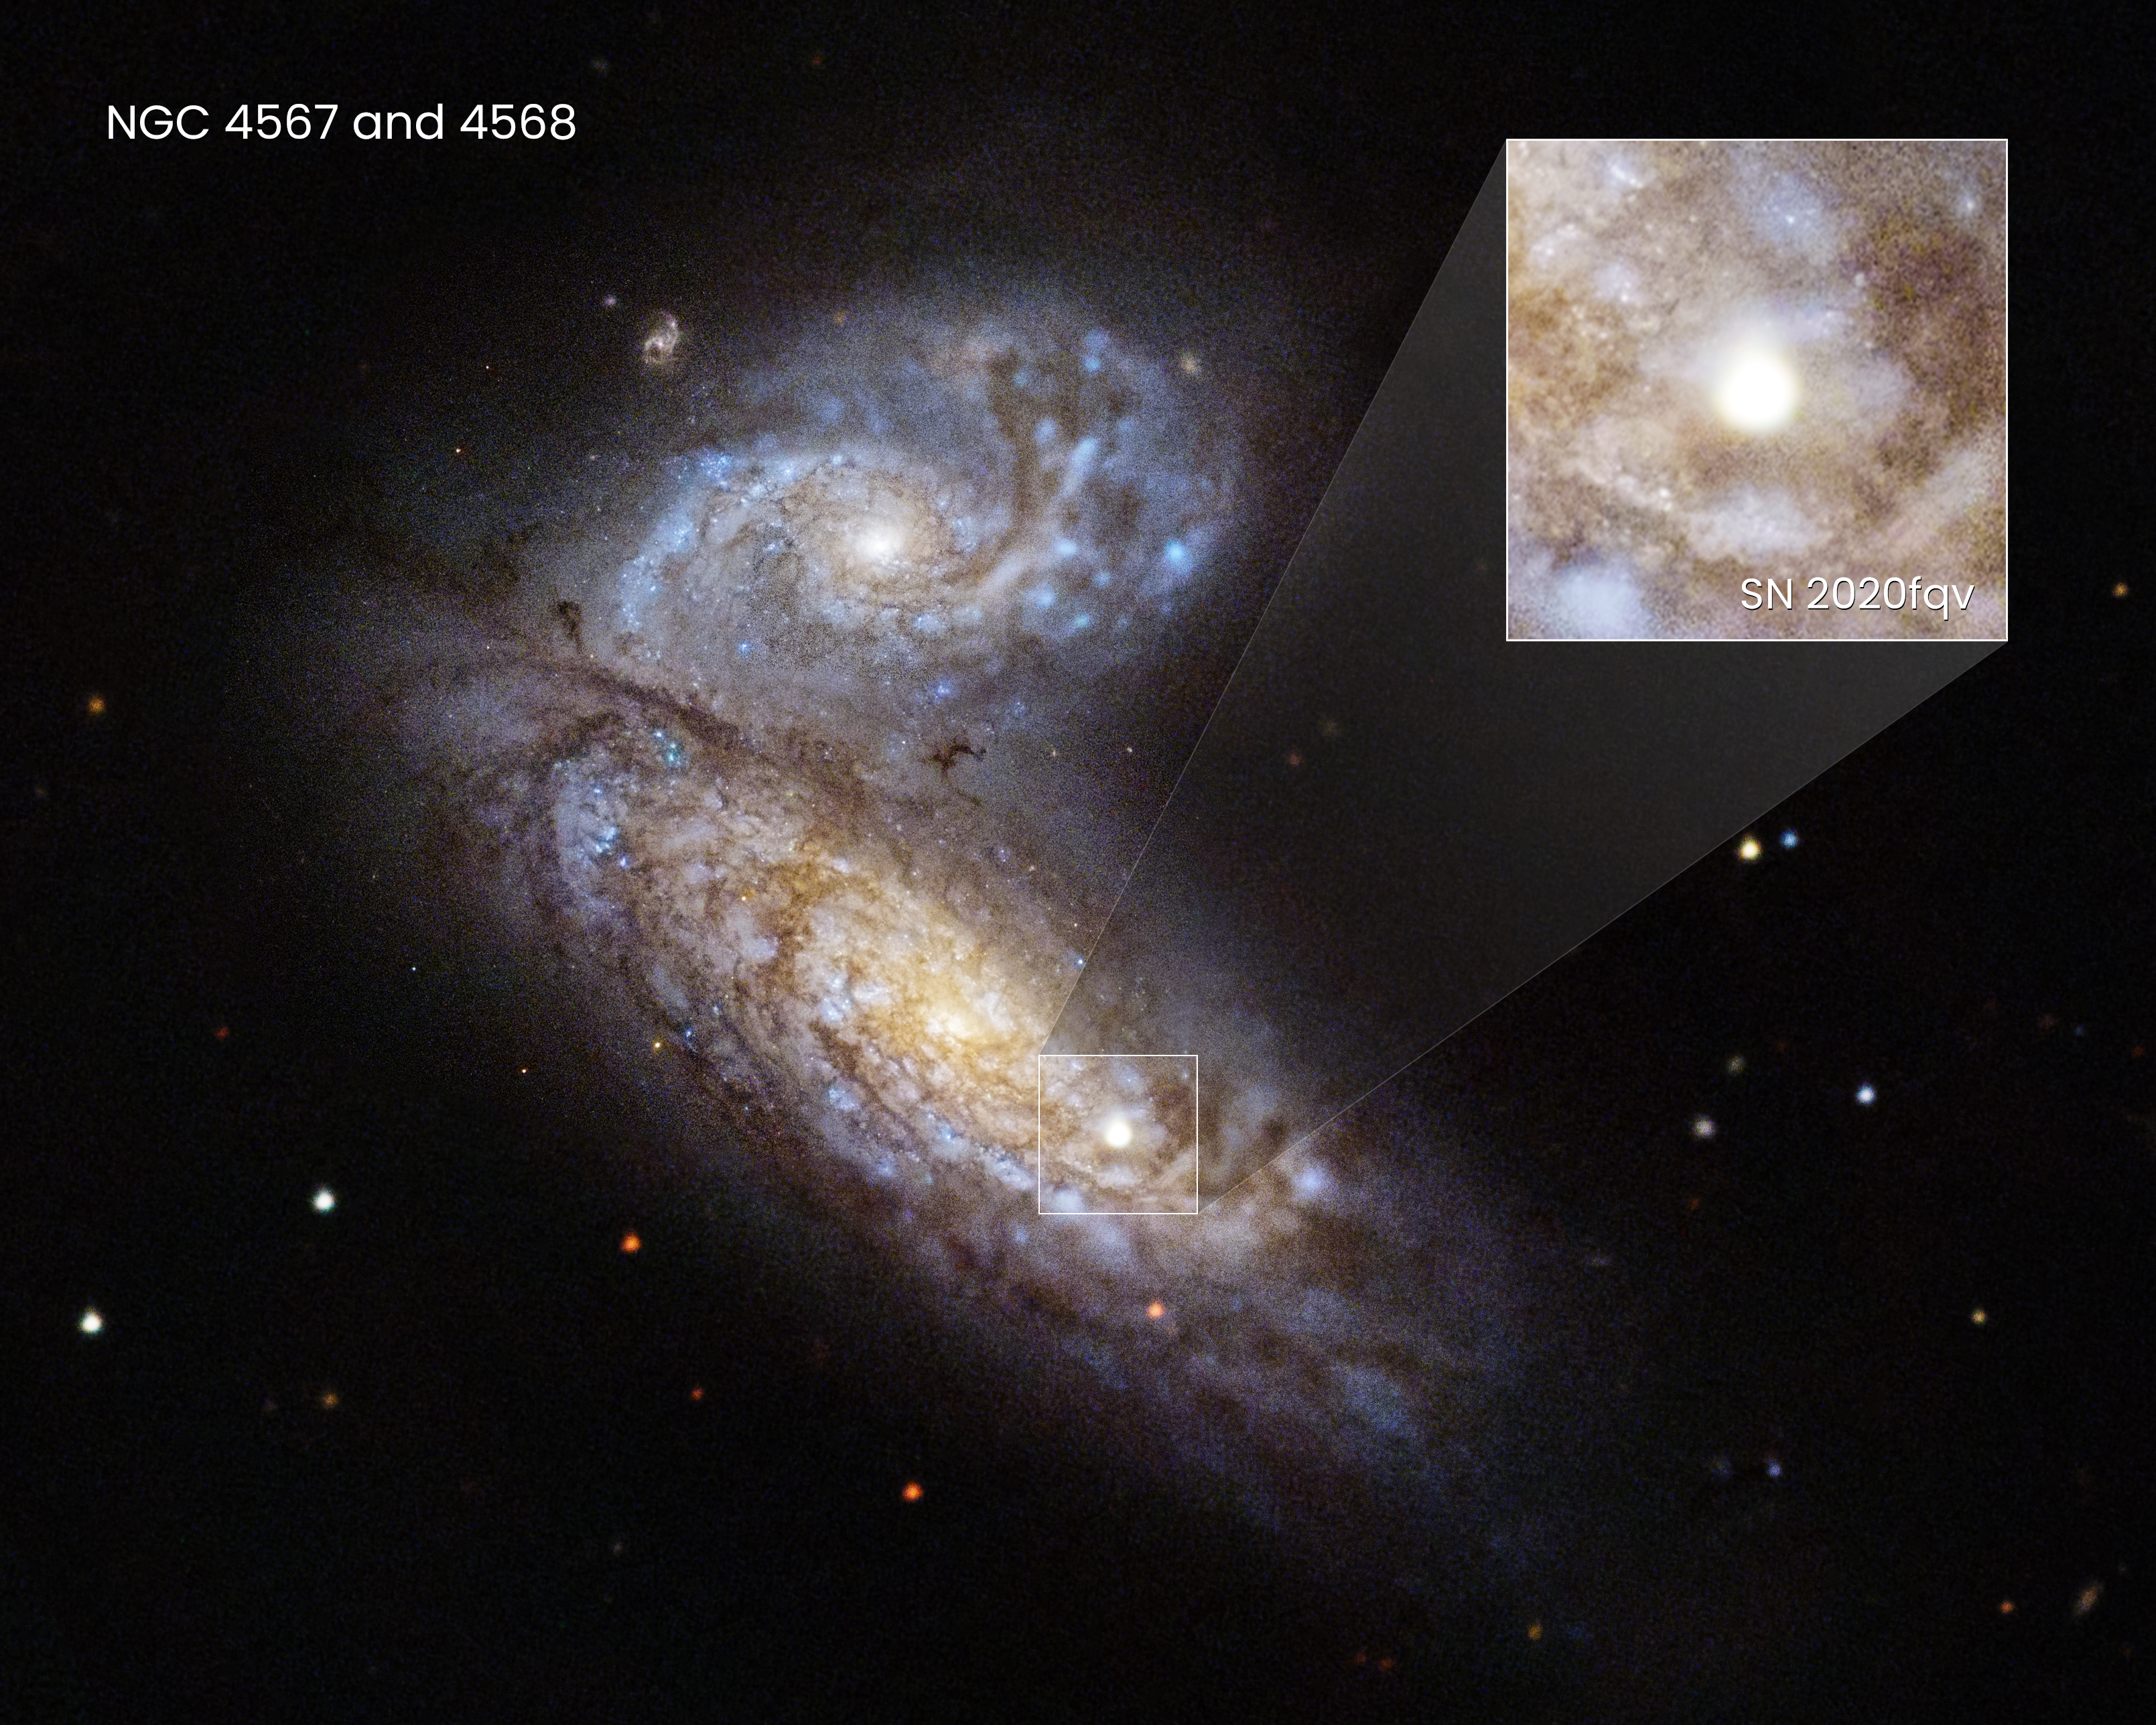

Hubble Captures Supernova in NGC 4568

Astronomers recently witnessed supernova SN 2020fqv explode inside the interacting Butterfly galaxies, located about 60 million light-years away in the constellation Virgo. Researchers quickly trained the NASA/ESA Hubble Space Telescope on the aftermath.

Along with other space- and ground-based telescopes, Hubble delivered a ringside seat to the first moments of the ill-fated star's demise, giving a comprehensive view of a supernova in the very earliest stage of exploding. Hubble probed the material very close to the supernova that was ejected by the star in the last year of its life. These observations allowed researchers to understand what was happening to the star just before it died, and may provide astronomers with an early warning system for other stars on the brink of death.

Credit: NASA, ESA, R. Foley (UC Santa Cruz), J. DePasquale (STScI)